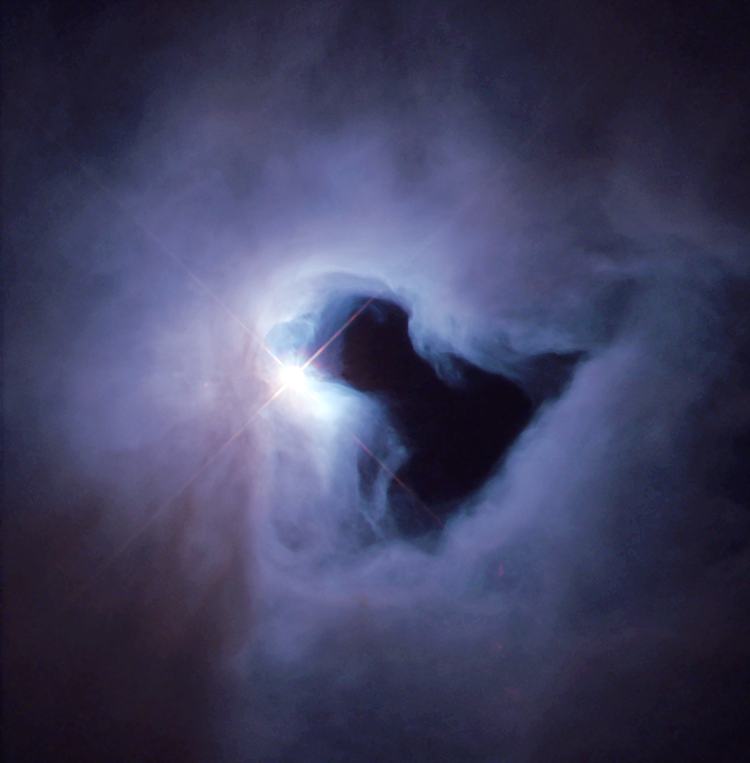

A reflection nebula in Orion

Just weeks after NASA astronauts repaired the Hubble Space Telescope in December 1999, the Hubble Heritage Project snapped this picture of NGC 1999, a nebula in the constellation Orion. The Heritage astronomers, in collaboration with scientists in Texas and Ireland, used Hubble's Wide Field Planetary Camera 2 (WFPC2) to obtain this colour image.

Credit: NASA/ESA and the Hubble Heritage Team (STScI)